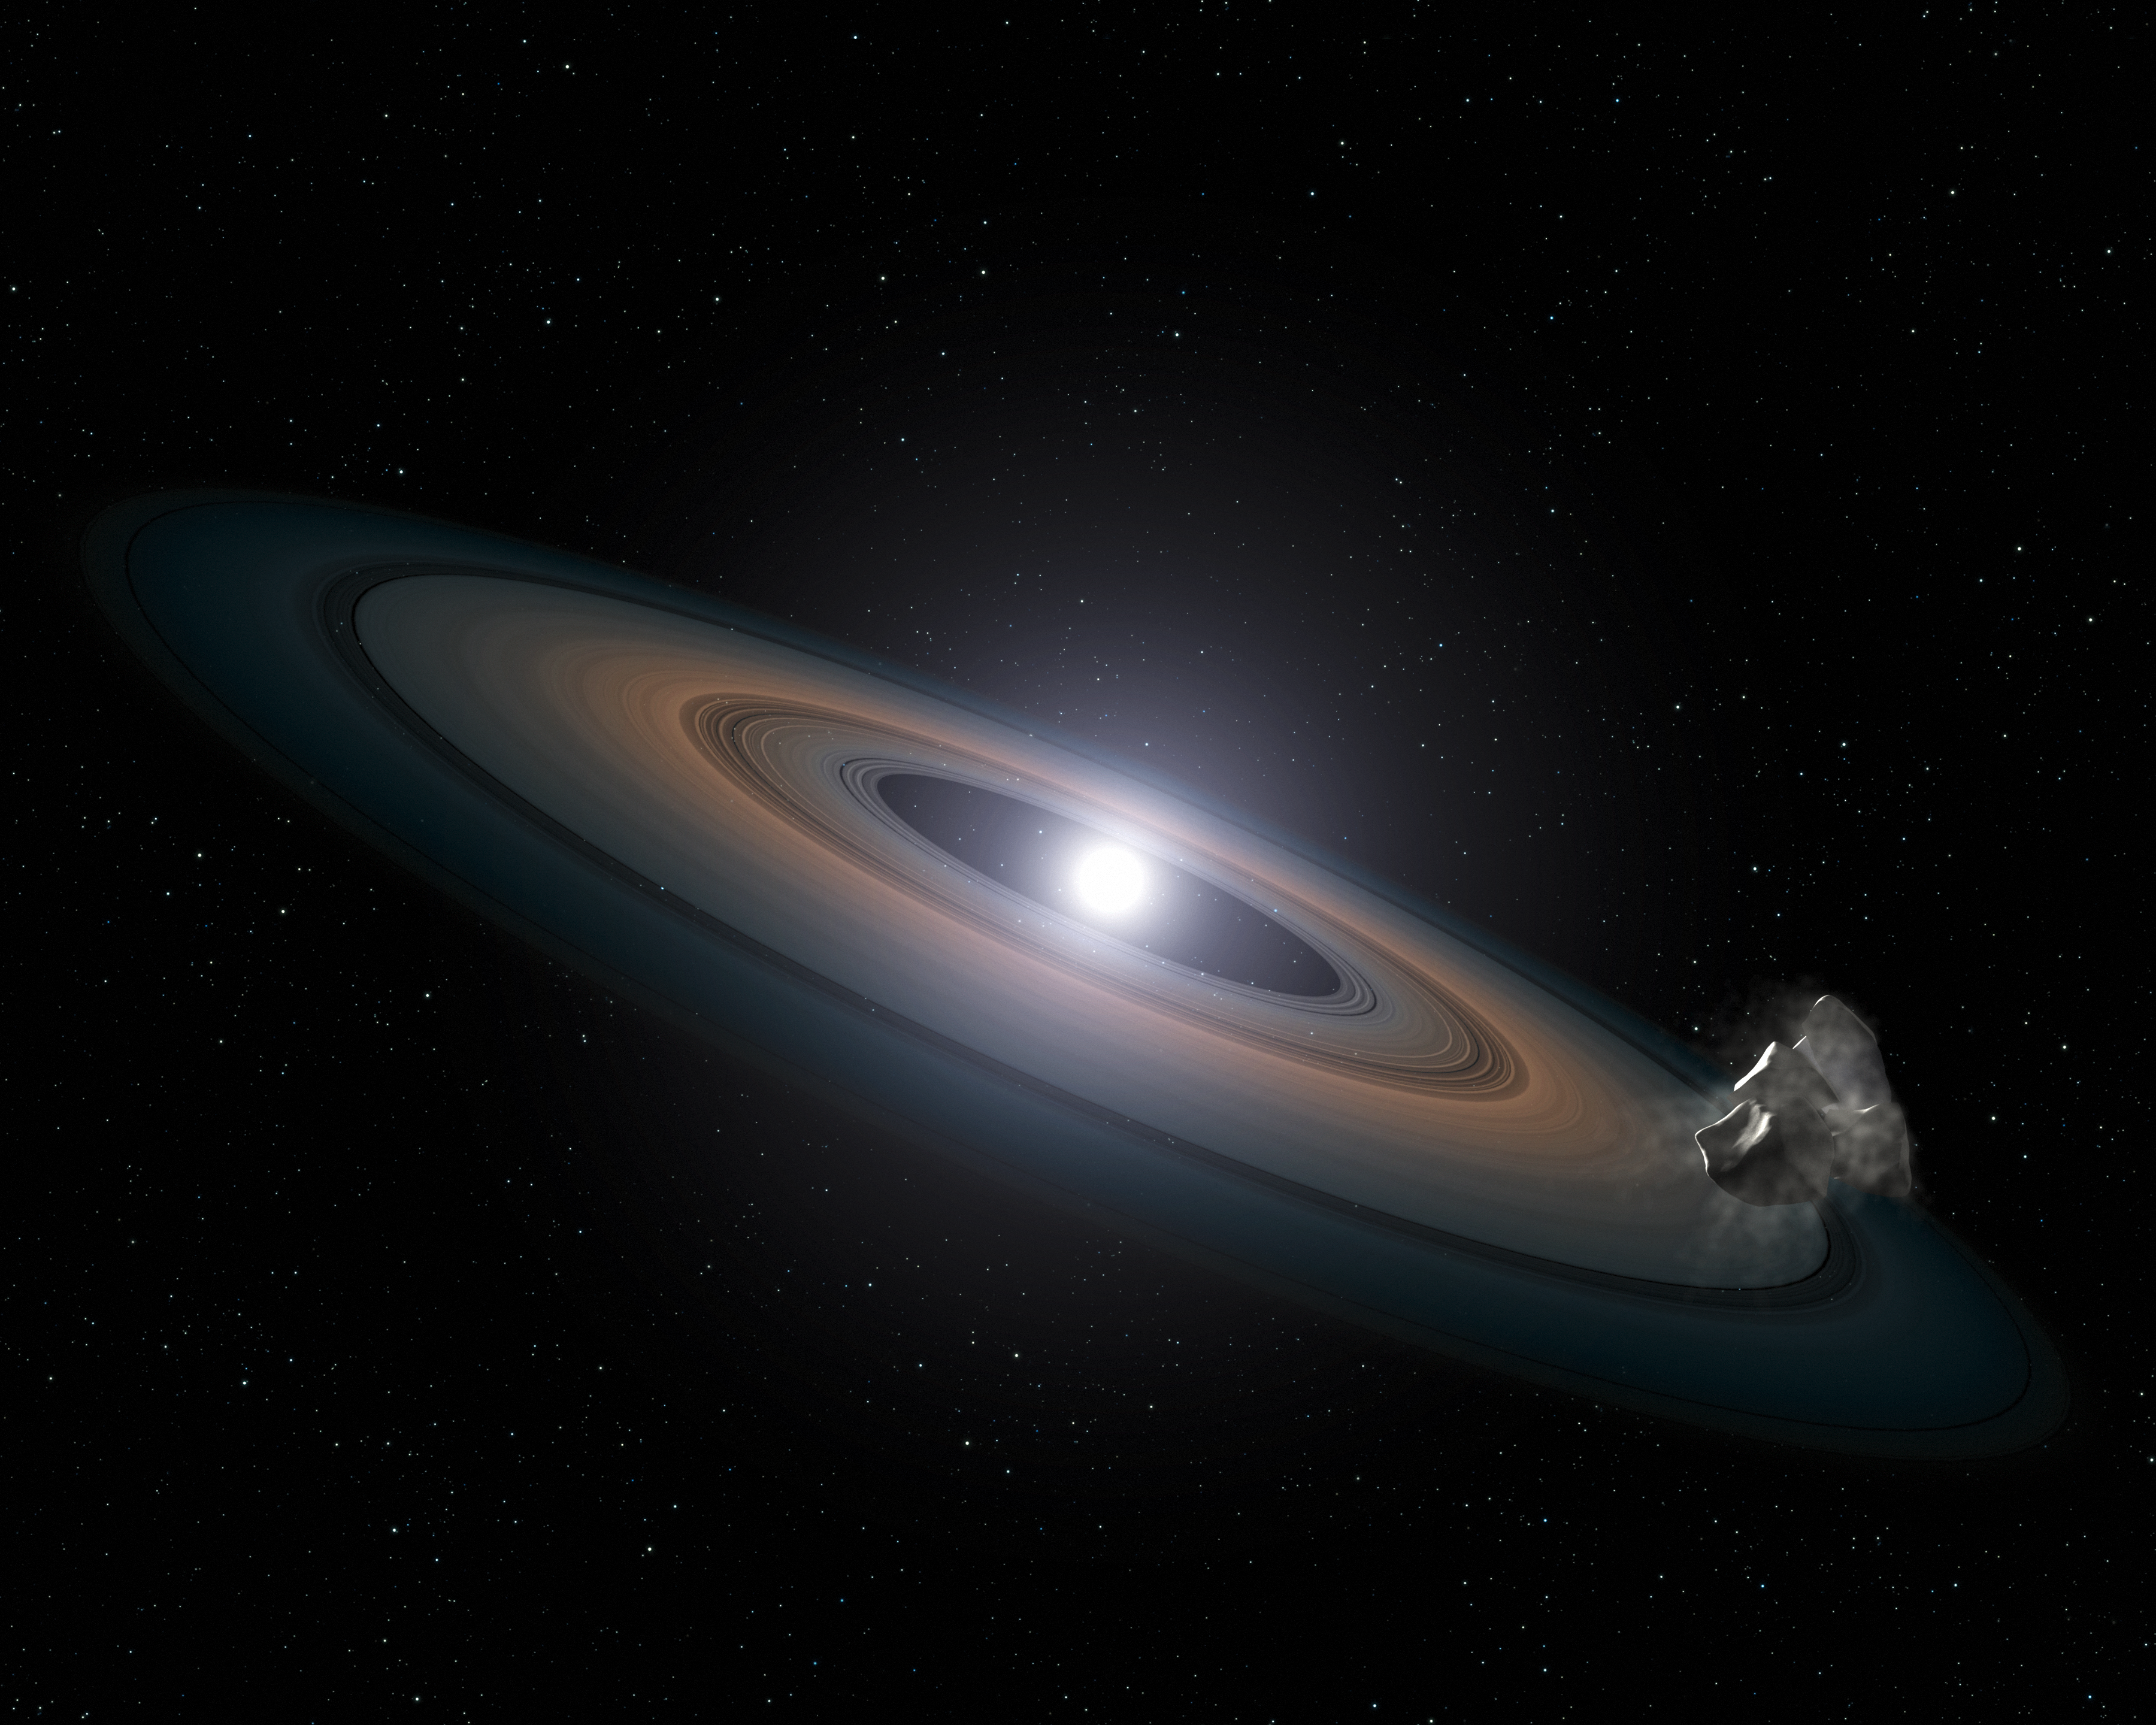

Artist’s impression of debris around a white dwarf star

This illustration is an artist's impression of the thin, rocky debris disc discovered around the two Hyades white dwarfs. Rocky asteroids are thought to have been perturbed by planets within the system and diverted inwards towards the star, where they broke up, circled into a debris ring, and were then dragged onto the star itself.

Credit: NASA, ESA, STScI, and G. Bacon (STScI)